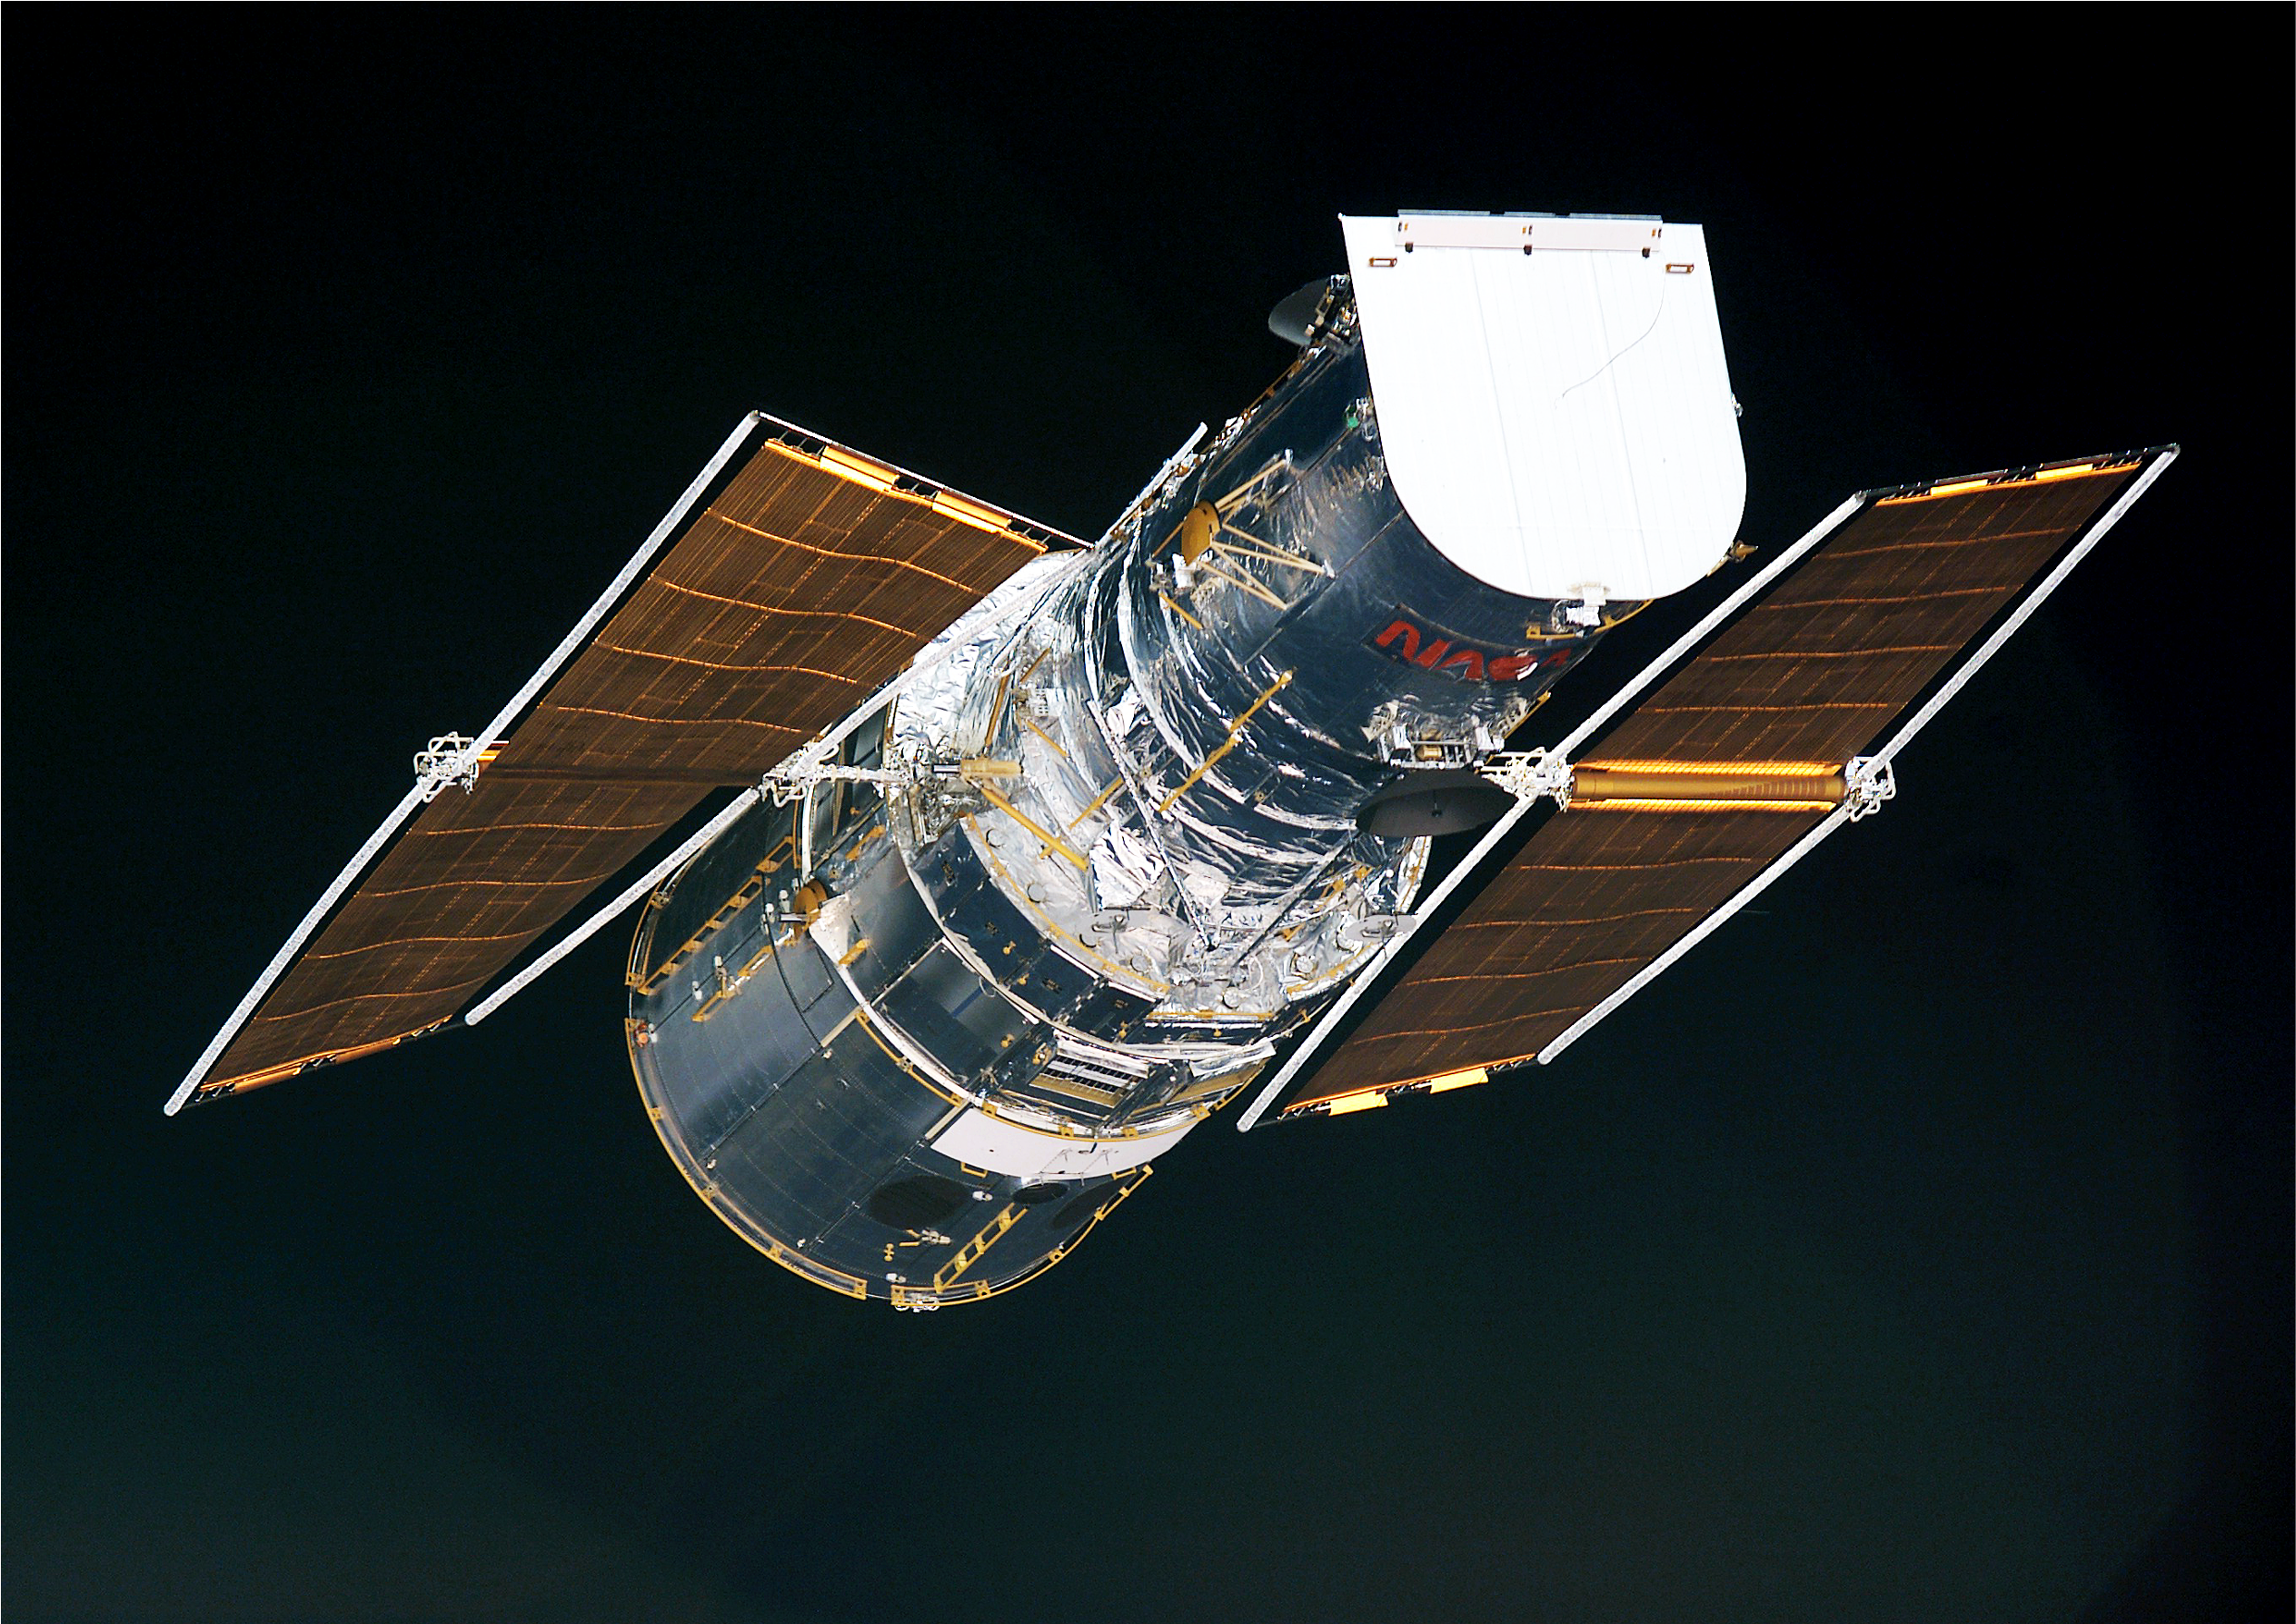

An overview of the two ESA solar arrays just before they were rolled up during Servicing Mission 3B

New rigid arrays were installed. The 'living', flexible structures of the European built arrays are easily seen. These Solar Panels have by far exceeded the expectations, both in terms of lifetime (65% longer life than specified) and in terms of performance (10% more output power than the expected).

Image taken 3 March 2002 08:31 UT

Credit: NASA/ESA